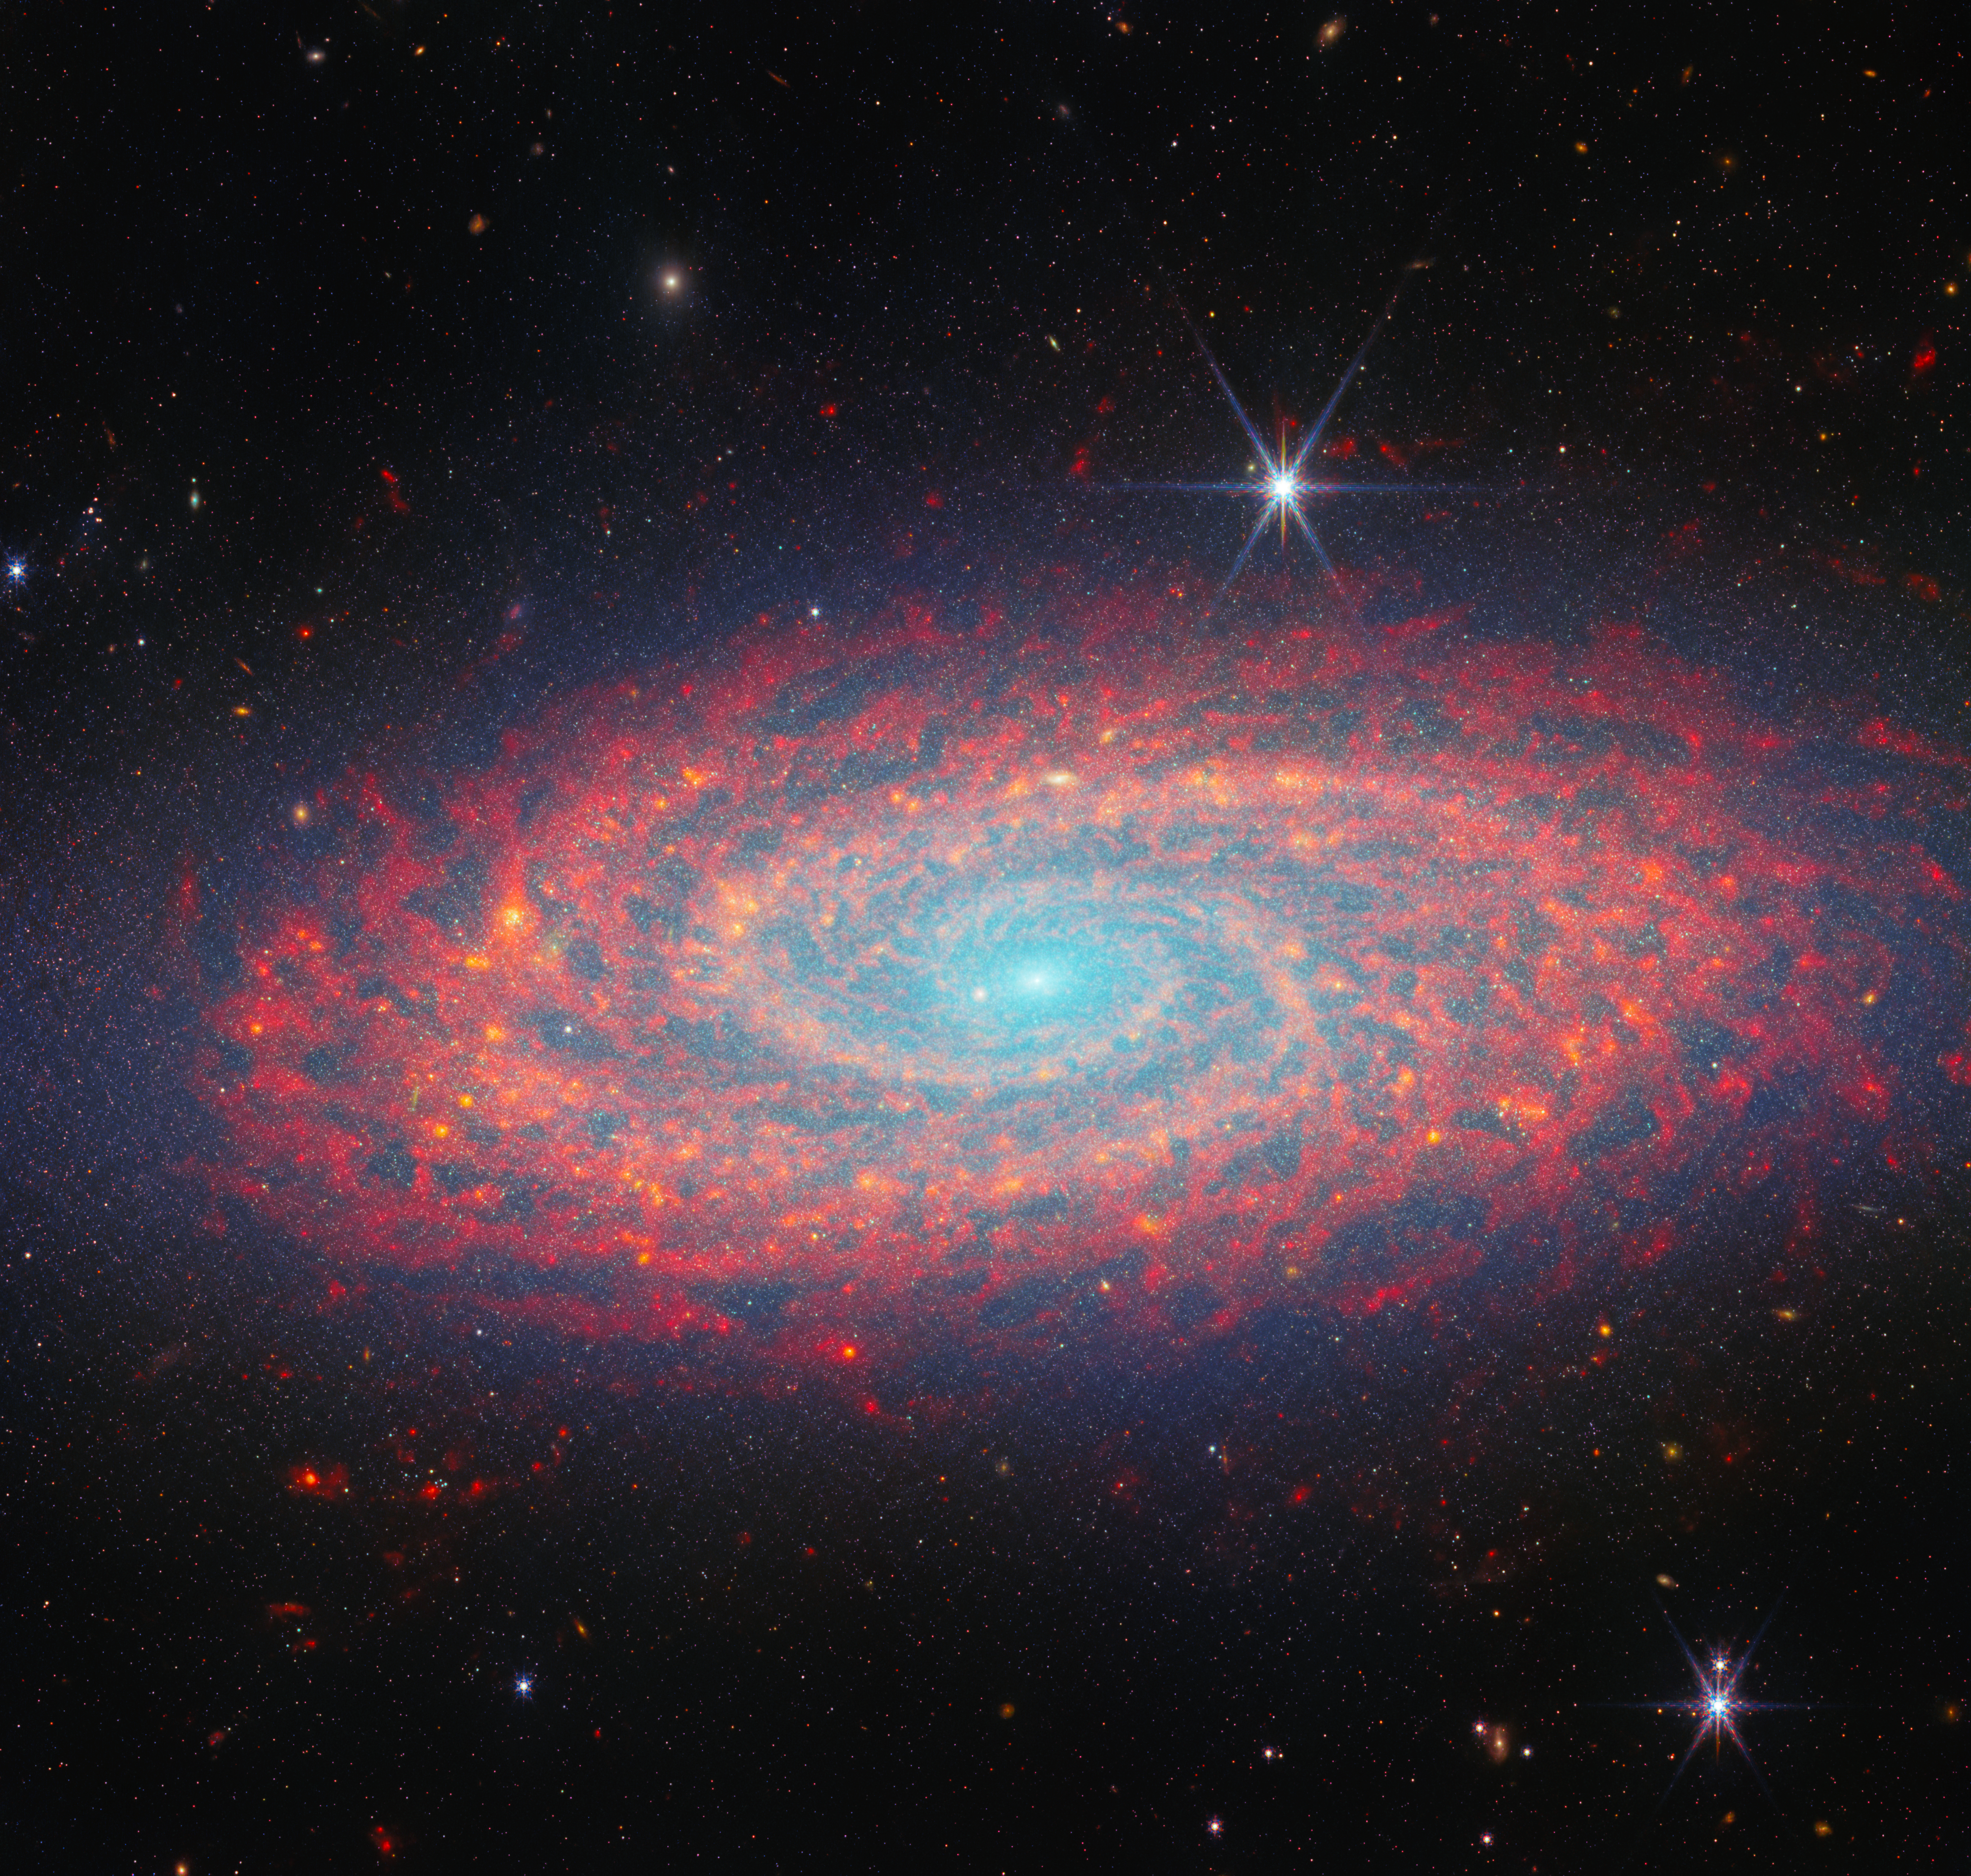

Tracing spiral arms in infrared

Featured in this NASA/ESA/CSA James Webb Space Telescope Picture of the Month is the spiral galaxy NGC 2090, located in the constellation Columba. This combination of data from Webb’s MIRI and NIRCam instruments shows the galaxy’s two winding spiral arms and the swirling gas and dust of its disc in magnificent and unique detail.

This was one of the group of galaxies studied early on by the NASA/ESA Hubble Space Telescope, observing Cepheid variable stars in it as part of refining the measurement of the Hubble constant. The Cepheid-based measurement from that study in 1998 put NGC 2090 as 37 million light-years away; the newest measurements have NGC 2090 slightly farther away, at 40 million light-years. Hubble is to this day surveying galaxies in visible and ultraviolet light; alongside this Webb image a new Hubble image of NGC 2090 has also been published this week, which you can find here.

Before and since that project, NGC 2090 has been well studied as a very prominent nearby example of star formation. It has been described as a flocculent spiral, meaning a spiral galaxy with a patchy, dusty disc and arms that are flaky or not visible at all. Visible-light images show this well, but the near-infrared data from NIRCam used in this image reveal the spiral arms with remarkable clarity. NIRCam also picks up bright light from stars, displayed by the blue colours most visible in the centre. Meanwhile, mid-infrared light emitted mainly by the important carbon-based compounds known as polycyclic aromatic hydrocarbons along the many strands of gas and dust is captured by MIRI and shown here in red.

These data on NGC 2090 were collected as part of an observing programme (#3707) taking a census of nearby massive, star-forming galaxies much like it. These galaxies are at just the right distance, with the right size and level of activity, that Webb’s instruments can capture a comprehensive picture of the star-forming activity, including the tightly-bound clusters that stars often form in, and the clouds of gas in the galaxy in which stars can be born. The rich collection of detailed images like this one will be of value to astronomers studying this area for years to come.

Credit: ESA/Webb, NASA & CSA, A. Leroy